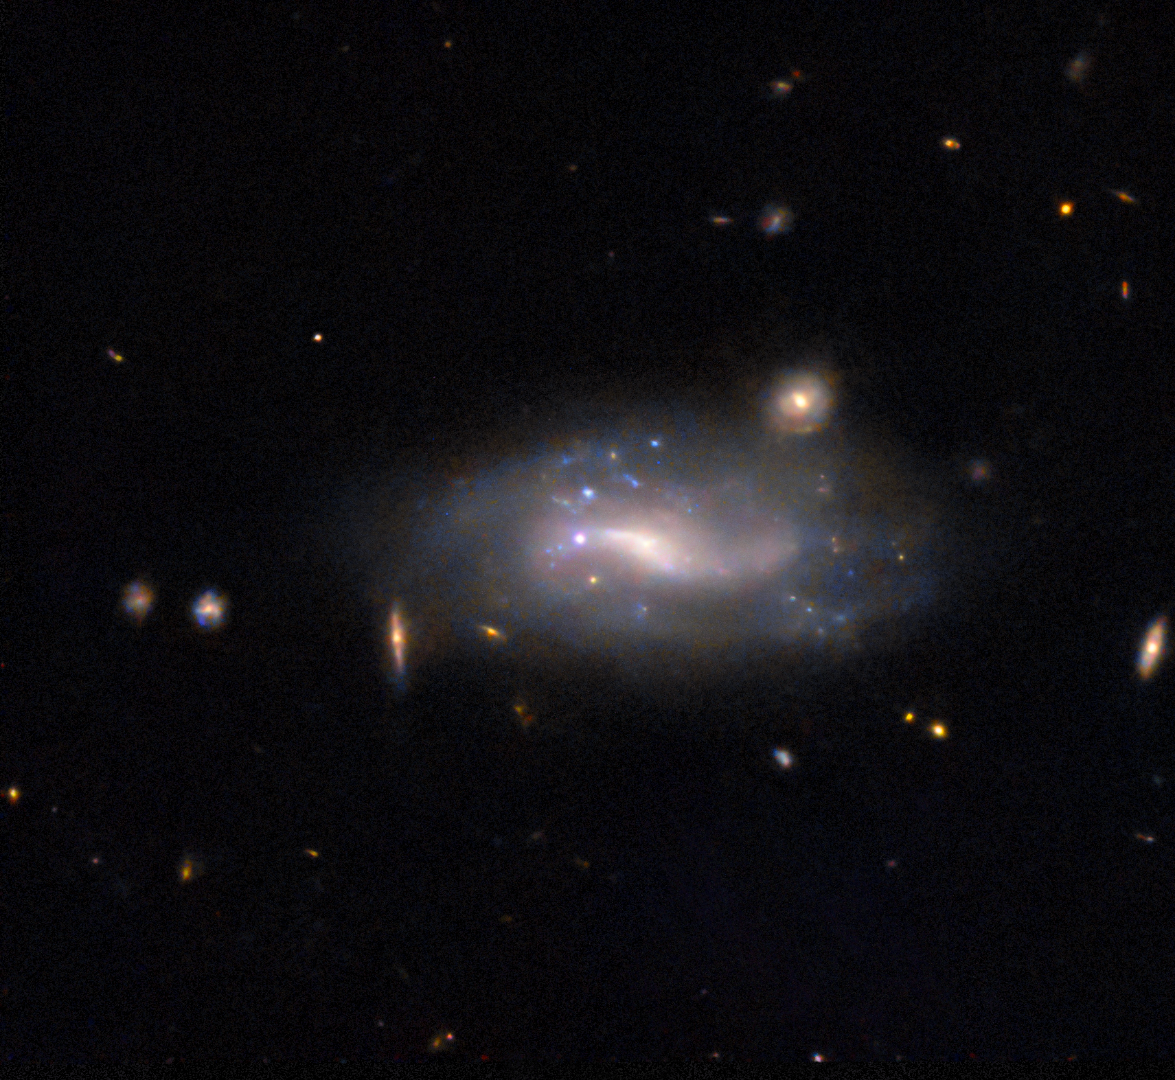

Supernova spotting

A supernova and its host galaxy are the subject of today’s NASA/ESA Hubble Space Telescope Picture of the Week. The galaxy in question is LEDA 132905, which is situated in the constellation Sculptor. Even at over 400 million light-years away, LEDA 132905’s spiral structure is faintly visible, as are patches of bright blue stars.

The bright white dot directly in the centre of the image, between the bright centre of the galaxy and its faint left edge, is a supernova named SN 2022abvt. SN 2022abvt was discovered in late 2022, and Hubble observed the explosion about two months later. This image was constructed from data collected to study Type Ia supernovae, which occur when the exposed core of a dead star ignites in a sudden, destructive burst of nuclear fusion. Researchers are interested in this type of supernova because they can be used to measure precise distances to other galaxies.

The Universe is a big place, and supernova explosions are fleeting. How is it possible to be in the right place at the right time to catch a supernova when it happens? Today, most supernovae are discovered by robotic telescopes that continuously scan the night sky. But some are still found the old-fashioned way, by careful observers who take repeated images of the sky and search for changes. SN 2022abvt was spotted by the Asteroid Terrestrial-impact Last Alert System, or ATLAS. As the name suggests, ATLAS was designed to track down the faint, fast-moving signals from asteroids close to Earth. In addition to searching out asteroids, ATLAS also keeps tabs on objects that brighten or fade suddenly, like supernovae, variable stars and galactic centres powered by hungry black holes.

Credit: ESA/Hubble & NASA, R. J. Foley (UC Santa Cruz)